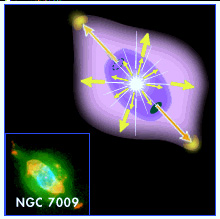

NGC 7009 illustration

NGC 7009 is a complex planetary nebula in the constellation Aquarius. The bottom left of the image shows the planetary nebula as it can be seen in the visual, where it is glowing in a greenish-yellowish light.

Originally the planetary nebula was a low mass star, with a mass less than 8 times the mass of the Sun, which ejected its layers into space. Today the center of the nebula hosts a white dwarf star, whose ultraviolet radiation is also the cause for the green color of the nebula.

The illustration shows how the elongated form of the planetary nebula is created by the rotation of the star.

Credit: NASA & ESA